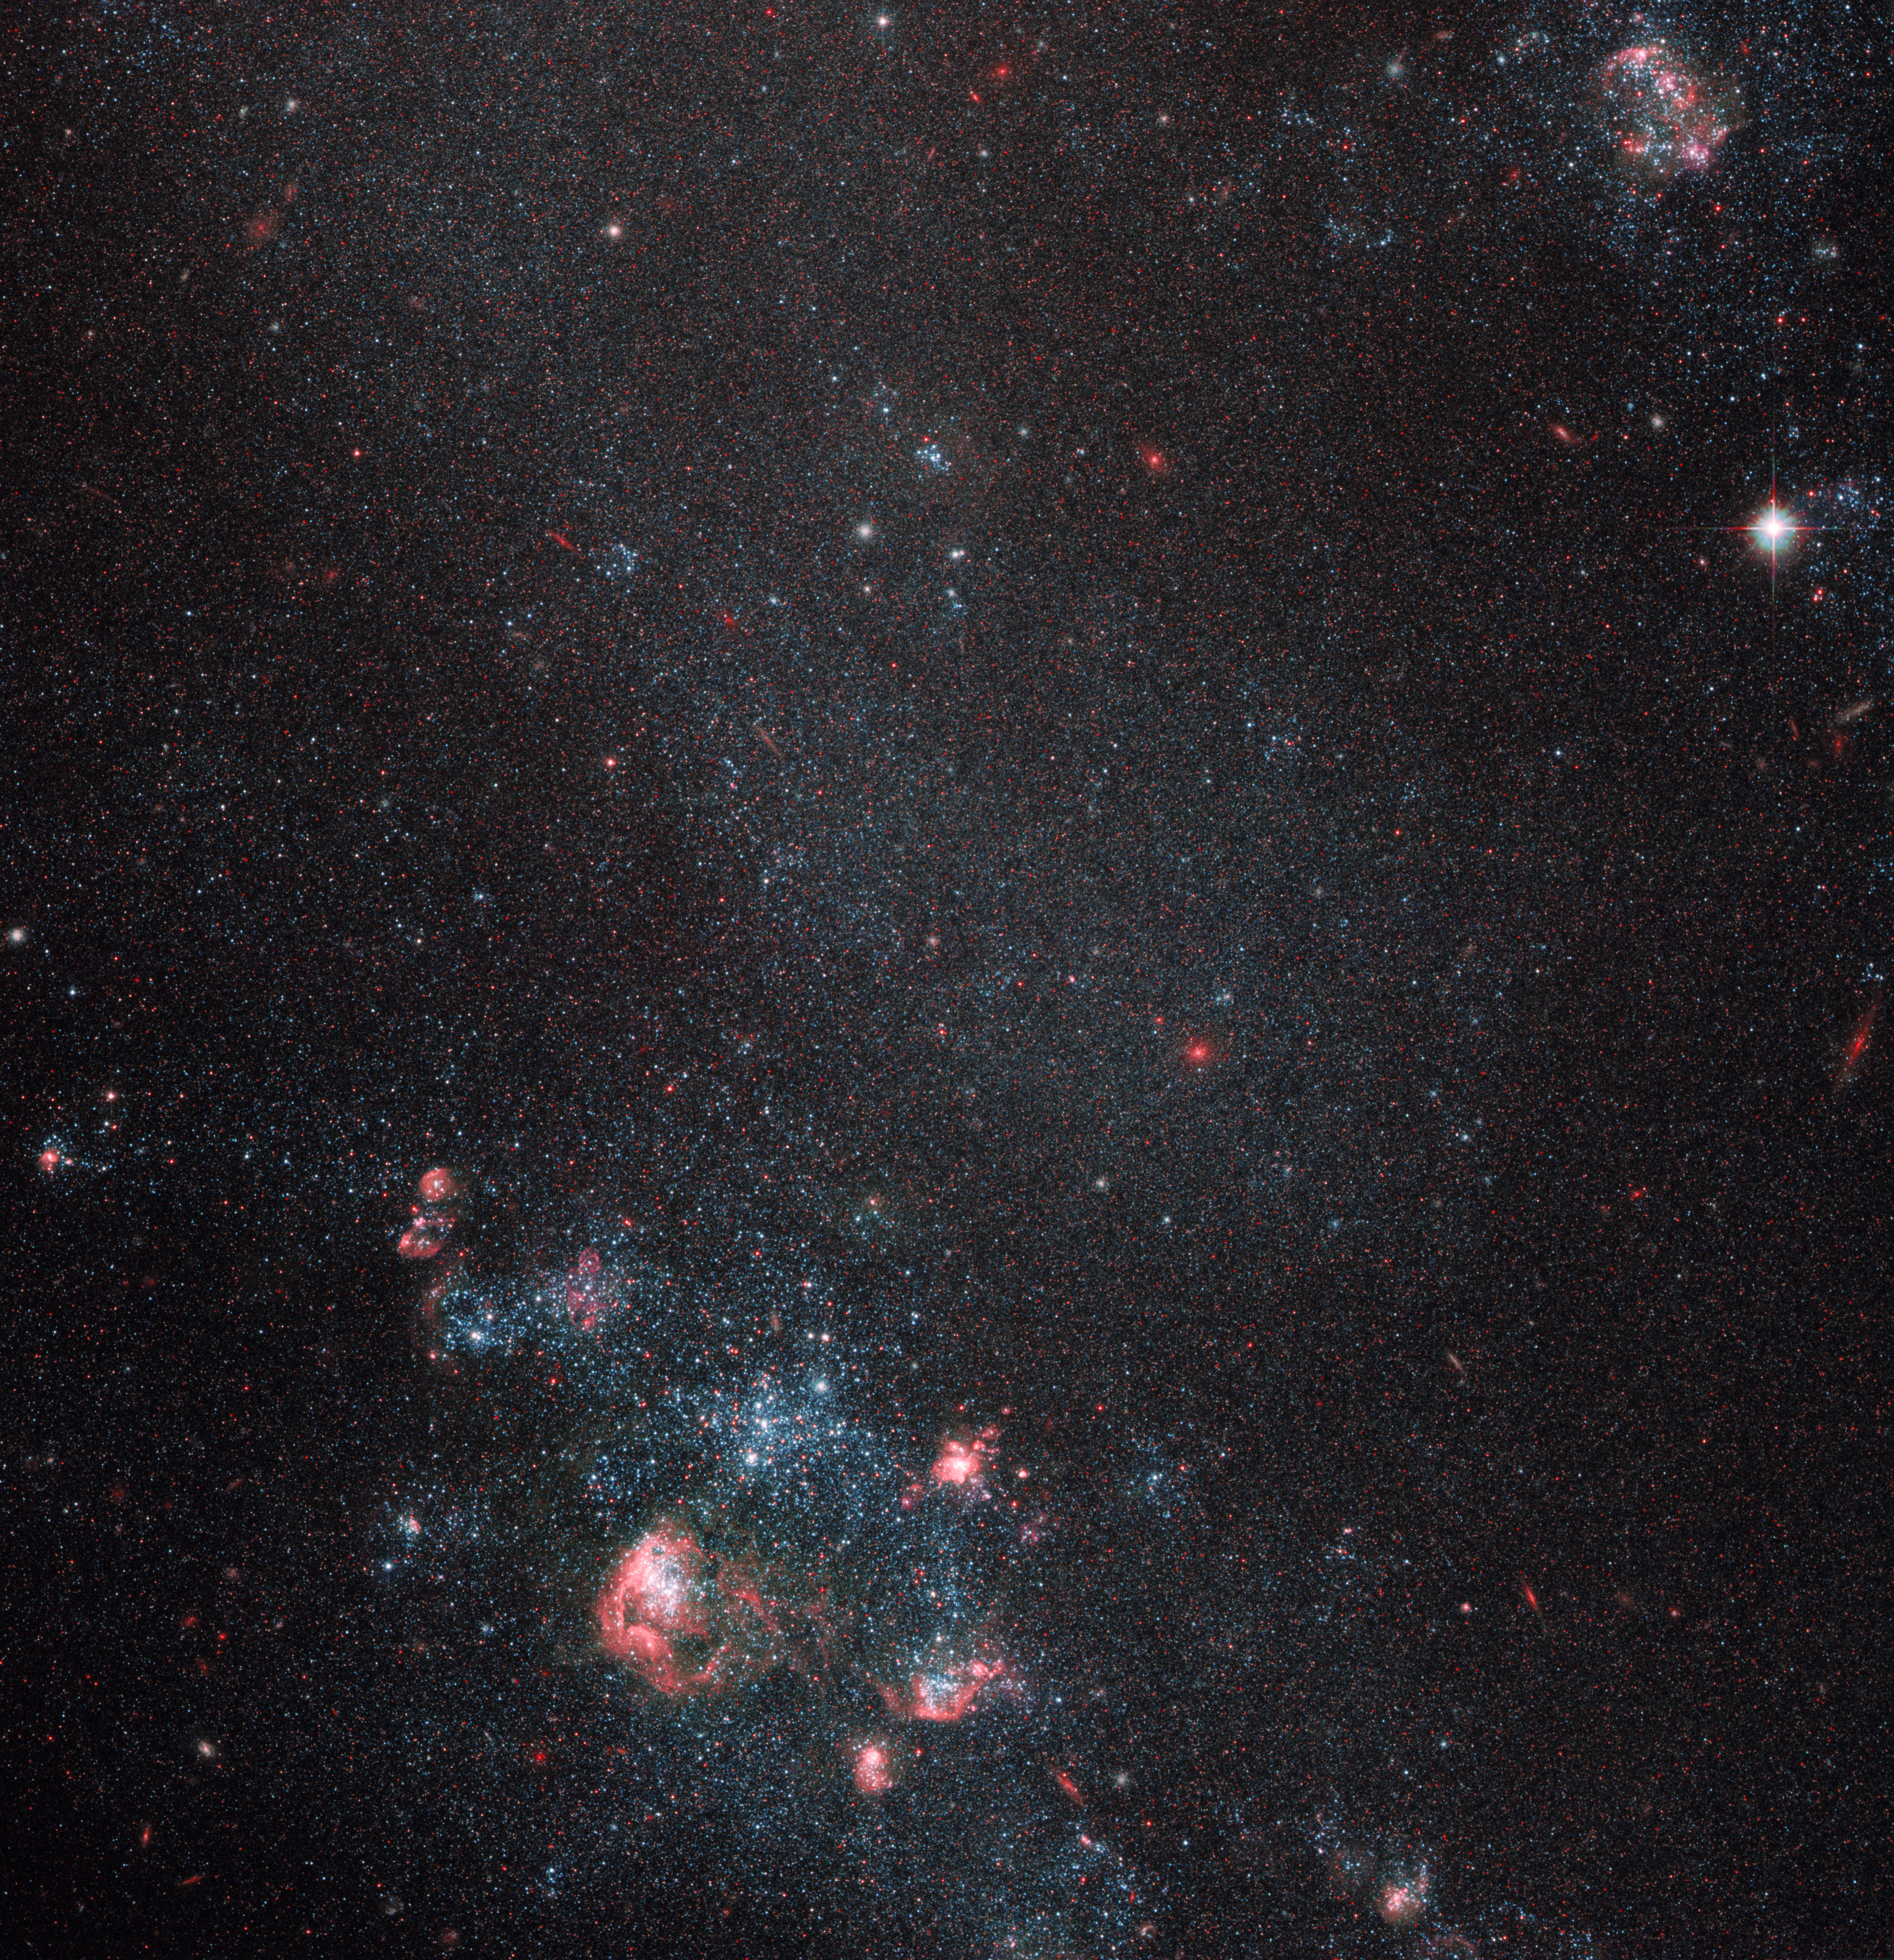

Faint galaxy with popping pink features

The NASA/ESA Hubble Space Telescope has imaged a region of space containing the intriguing object IC 2574. Pink bubbles blown by supernova explosions abound in this faint galaxy. The colour of these shells comes from hydrogen gas irradiated by newborn stars. The formation of the stars was triggered by shock waves from earlier supernova detonations that compressed material together.

IC 2574 is commonly known as Coddington's Nebula after the American astronomer Edwin Coddington, who discovered it in 1898. Astronomers classify IC 2574 as a dwarf irregular galaxy due to its relatively small size and lack of organisation or structure. These galaxies are thought to resemble some of the earliest that formed in the Universe. Dwarf irregular galaxies thus serve as useful "living fossils" for studying the evolution of more complex galaxy types such as our home, the Milky Way, with its central bar and spiral arms. The expanding shells in IC 2574 are of particular interest to astronomers as they reveal how supernova-driven explosions ignite round after round of star formation.

The constellation containing IC 2574 is Ursa Major (The Great Bear). IC 2574 is located about 12 million light-years away, belonging to the Messier 81 group of galaxies. This group is named after the most prominent galaxy in its midst, the big, bright and accordingly well-studied spiral galaxy Messier 81.

This picture was produced with Hubble’s Advanced Camera for Surveys, and covers a field of view of around 3.3 by 3.3 arcminutes.

Credit: ESA/Hubble & NASA